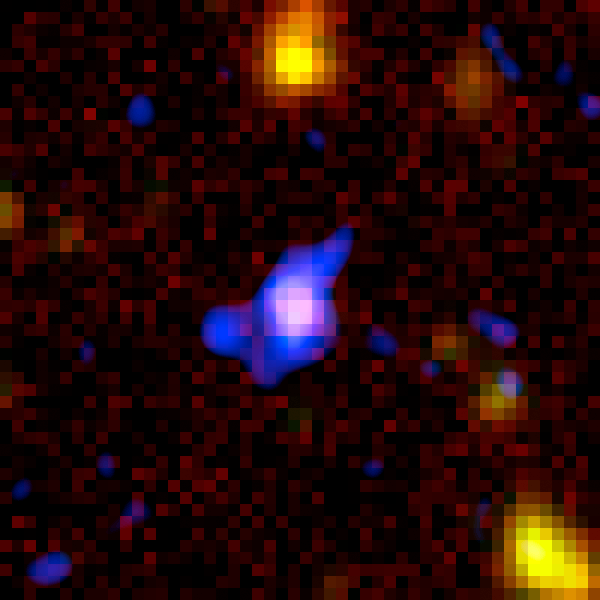

Spitzer+Chandra: Object #7 53.215169-27.870226

The combined power of NASA's Great Observatories - the Hubble Space Telescope, the Chandra X-ray Observatory, and the Spitzer Space Telescope - have been combined to find a hidden population of supermassive black holes in the universe. It took the penetrating view of Spitzer to finally uncover the black holes and their surrounding galaxies.

Credit: NASA, ESA, A. M. Koekemoer (STScI), M. Dickinson (NOAO) and The GOODS Team